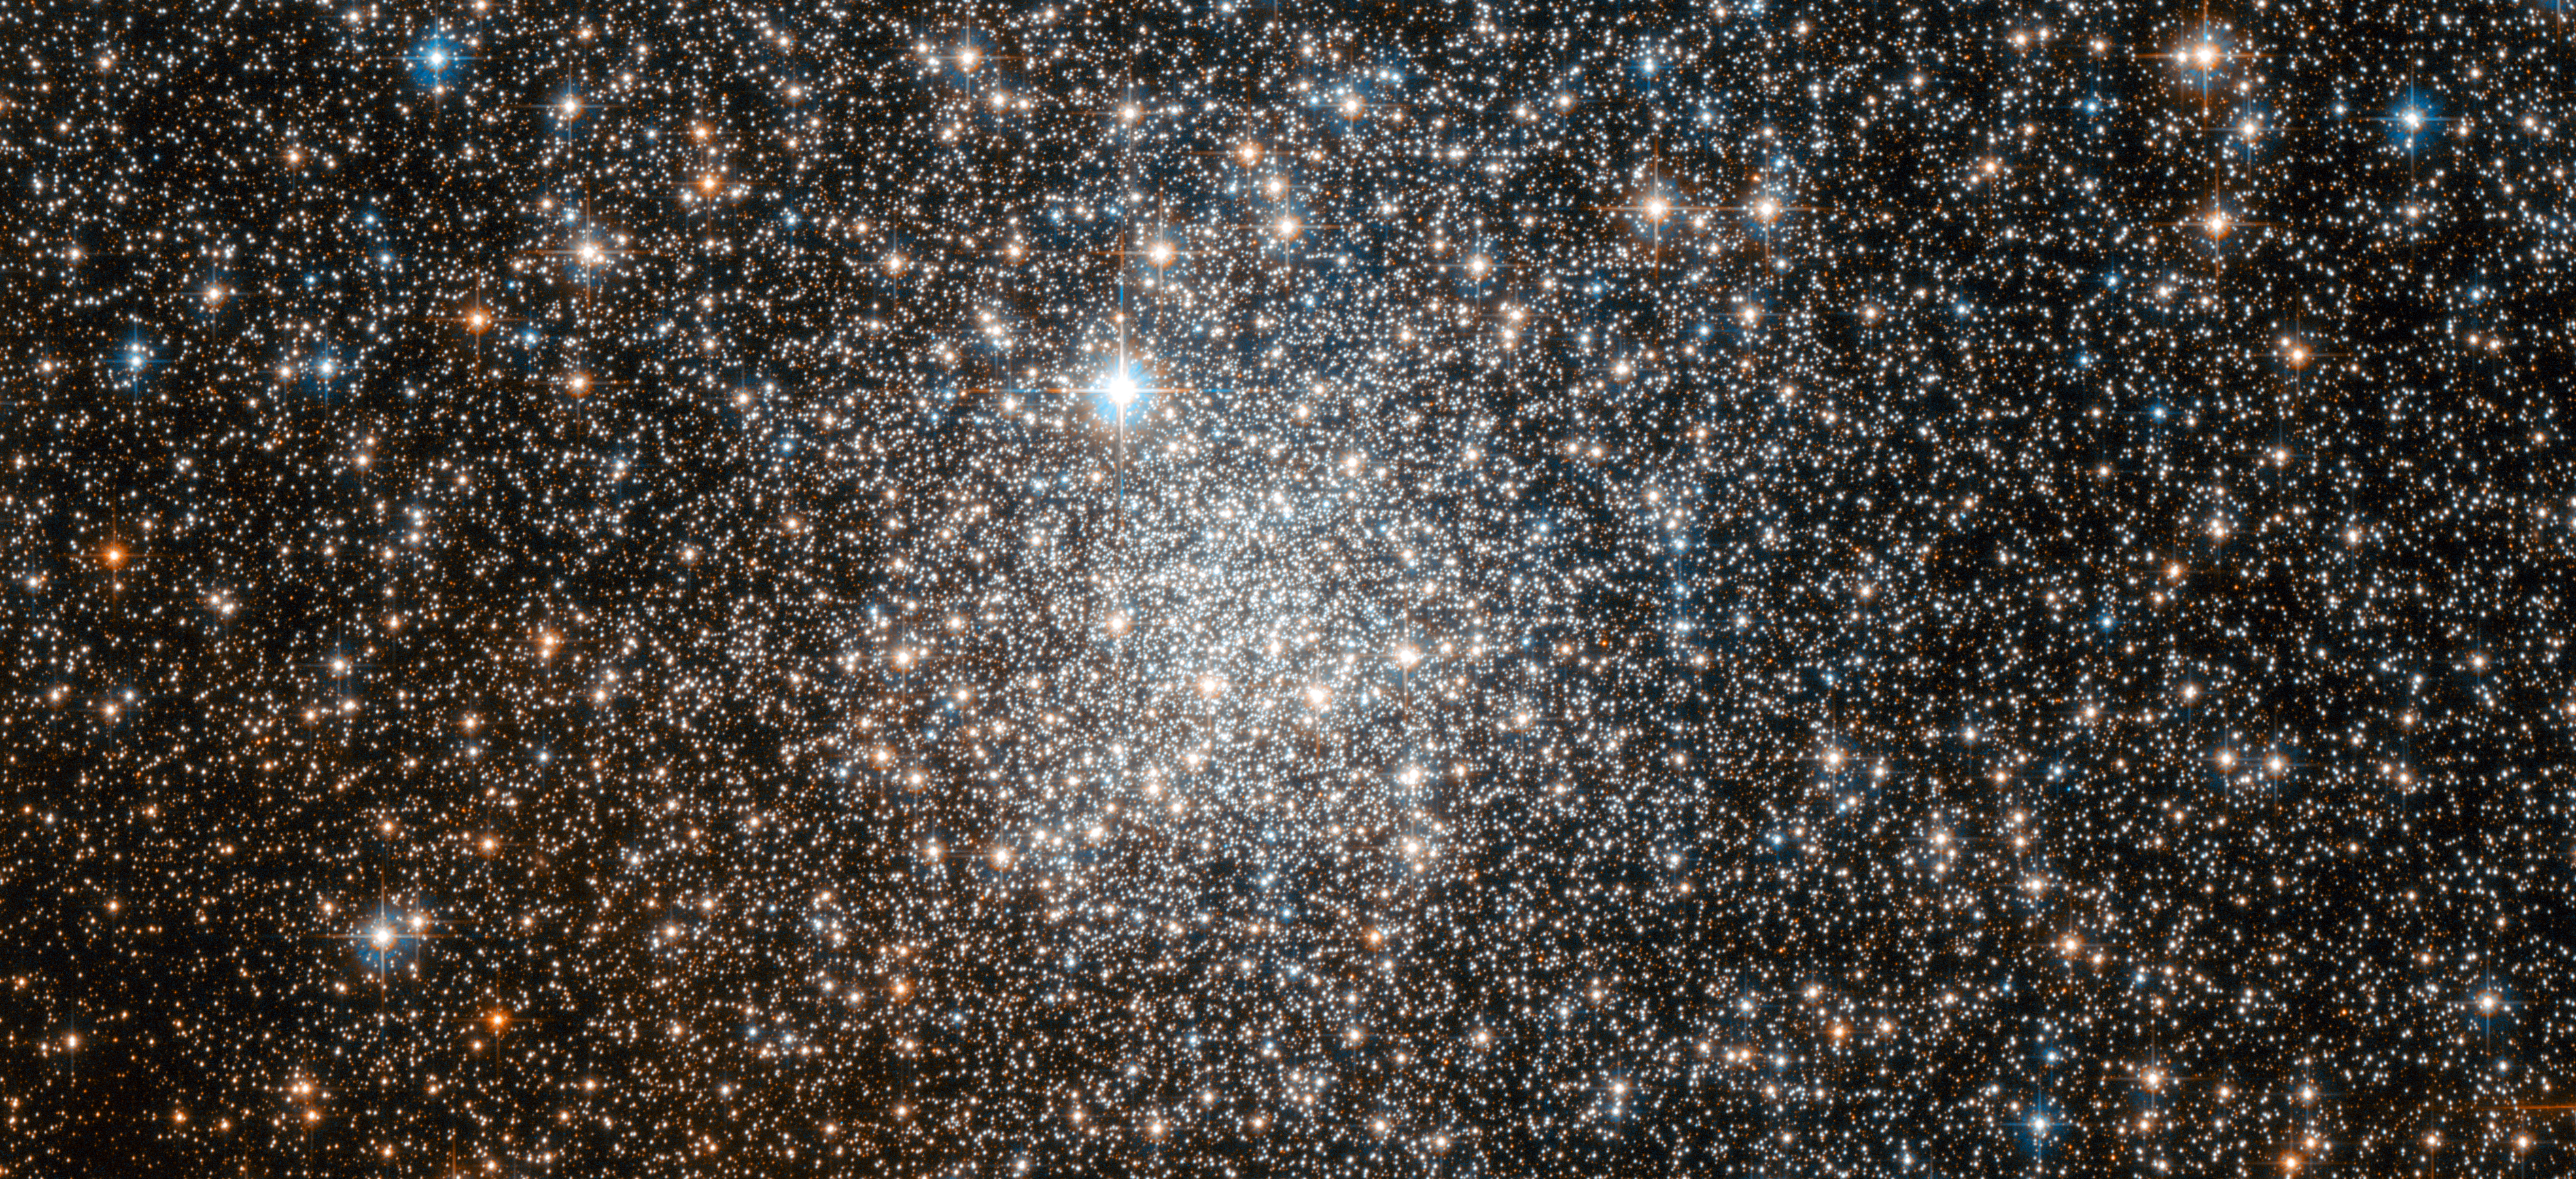

Enigmatic cluster targeted by Hubble

The NASA/ESA Hubble Space Telescope has used its powerful optics to separate the globular cluster NGC 6401 into its constituent stars. What was once only visible as a ghostly mist in the eyepieces of astronomical instruments has been transformed into a stunning stellar landscape.

NGC 6401 can be found within the constellation of Ophiuchus (The Serpent Bearer). The globular cluster itself is relatively faint, so a telescope and some observational experience are required to see it. Globular clusters are very rich, and generally spherical, collections of stars, hence the name. They orbit the cores of galaxies, with the force of gravity also keeping the stars bound as a group. There are around 160 globular clusters associated with our Milky Way, of which NGC 6401 is one. These objects are very old, containing some of the most ancient stars known. However, there are many mysteries surrounding them, with the origin of globular clusters and their role within galaxy evolution not being completely understood.

The famous astronomer William Herschel discovered this cluster in 1784 with his 47 cm telescope, but mistakenly believed it to be a bright nebula. Later his son, John Herschel, was to make the same error — evidently the technology of the day was insufficient to allow the individual stars to be resolved visually.

NGC 6401 has confused more modern astronomers as well. In 1977 it was thought that a low-mass star in the cluster had been discovered venting its outer layers (known as a planetary nebula). However, a further study in 1990 concluded that the object is in fact a symbiotic star: a binary composed of a red giant and a small hot star such as a white dwarf, with surrounding nebulosity. It could be that the study in 1977 was simply a few thousand years ahead of its time, as symbiotic stars are thought to become a type of planetary nebula.

This picture was created from images taken with the Wide Field Channel of Hubble’s Advanced Camera for Surveys. Images through a yellow-orange filter (F606W, coloured blue) were combined with images taken in the near-infrared (F814W, coloured red). The total exposure times were 680 s and 580 s, respectively and the field of view is 3.3 x 1.5 arcminutes.

Credit: ESA/Hubble & NASA